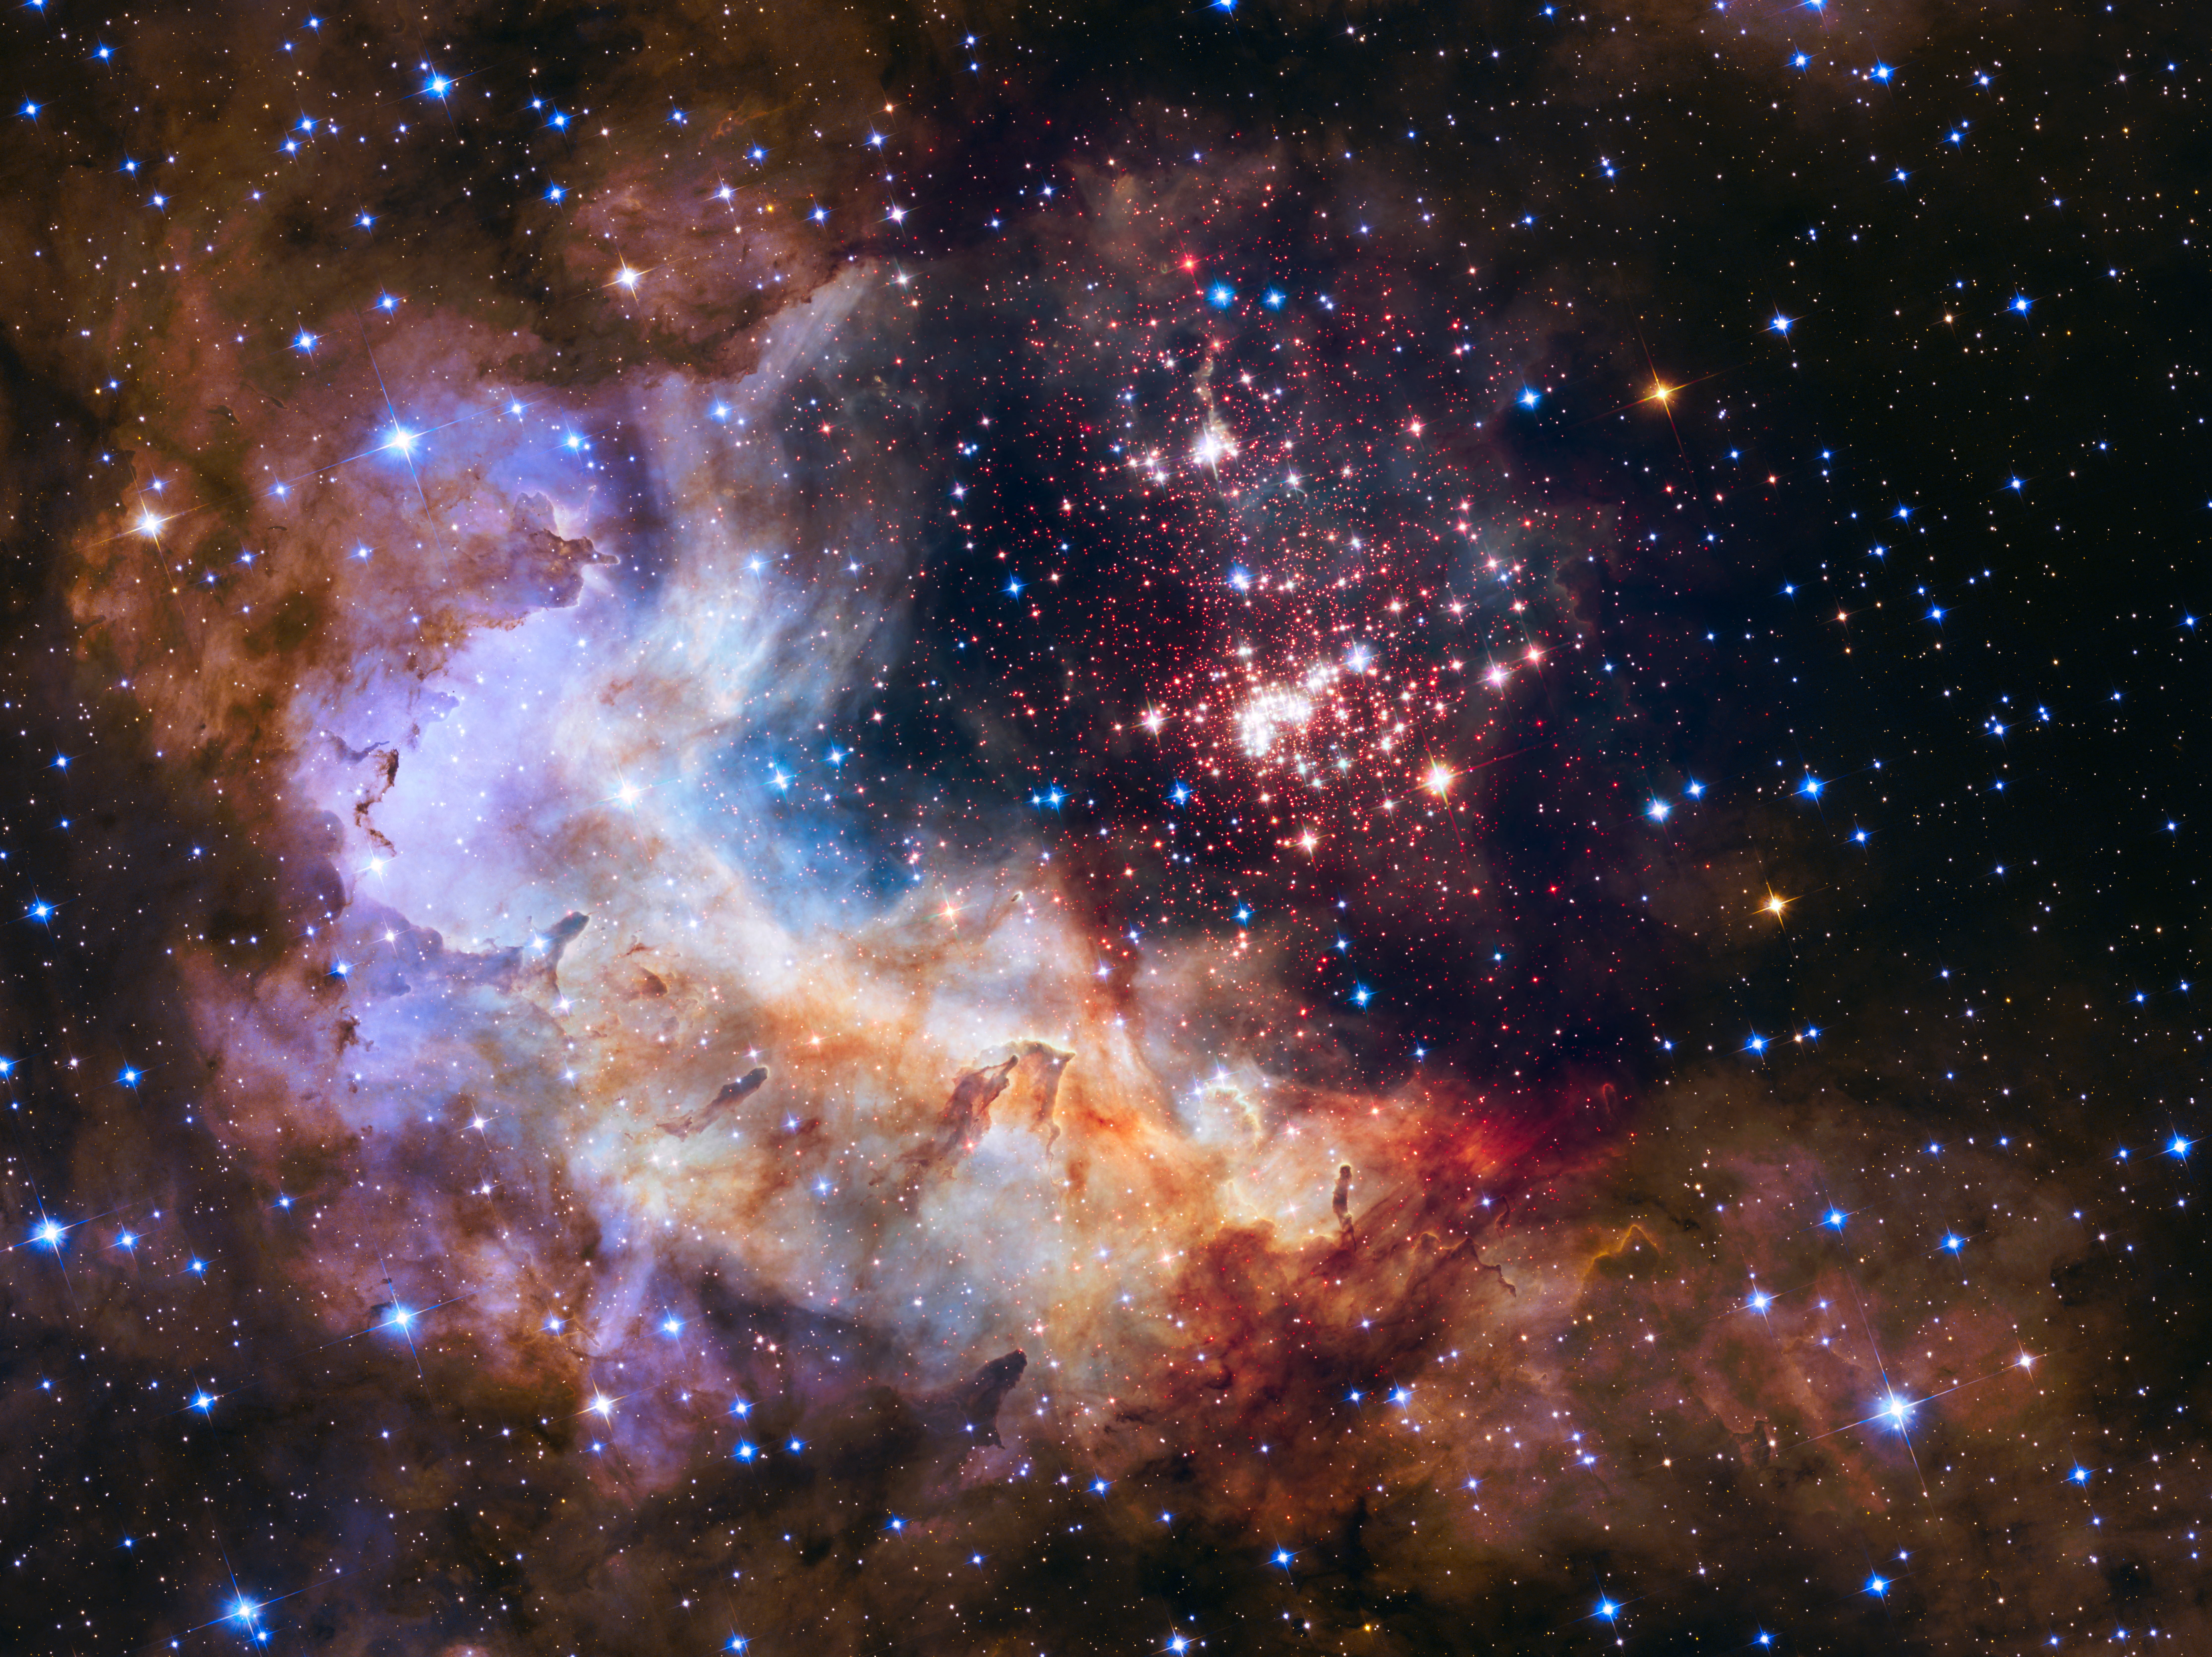

Westerlund 2 — Hubble’s 25th anniversary image

This NASA/ESA Hubble Space Telescope image of the cluster Westerlund 2 and its surroundings has been released to celebrate Hubble’s 25th year in orbit and a quarter of a century of new discoveries, stunning images and outstanding science.

The image’s central region, containing the star cluster, blends visible-light data taken by the Advanced Camera for Surveys and near-infrared exposures taken by the Wide Field Camera 3. The surrounding region is composed of visible-light observations taken by the Advanced Camera for Surveys.

Credit: NASA, ESA, the Hubble Heritage Team (STScI/AURA), A. Nota (ESA/STScI), and the Westerlund 2 Science Team
The original observations of Westerlund 2 were obtained by the science team: Antonella Nota (ESA/STScI), Elena Sabbi (STScI), Eva Grebel and Peter Zeidler (Astronomisches Rechen-Institut Heidelberg), Monica Tosi (INAF, Osservatorio Astronomico di Bologna), Alceste Bonanos (National Observatory of Athens, Astronomical Institute), Carol Christian (STScI/AURA) and Selma de Mink (University of Amsterdam). Follow-up observations were made by the Hubble Heritage team: Zoltan Levay (STScI), Max Mutchler, Jennifer Mack, Lisa Frattare, Shelly Meyett, Mario Livio, Carol Christian (STScI/AURA), and Keith Noll (NASA/GSFC).